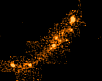

Gravitationally lensed image of highest redshift galaxy

A close-up of the gravitationally-lensed image shows why astronomers are excited about this unique opportunity to study the distant galaxy's structure. The stretched-out image reveals tiny knots of vigorous starbirth activity. This provides a first detailed look at the early construction phase of a galaxy undergoing formation.

Credit: Marijn Franx (University of Groningen, The Netherlands), Garth Illingworth (University of California, Santa Cruz), and NASA/ESA